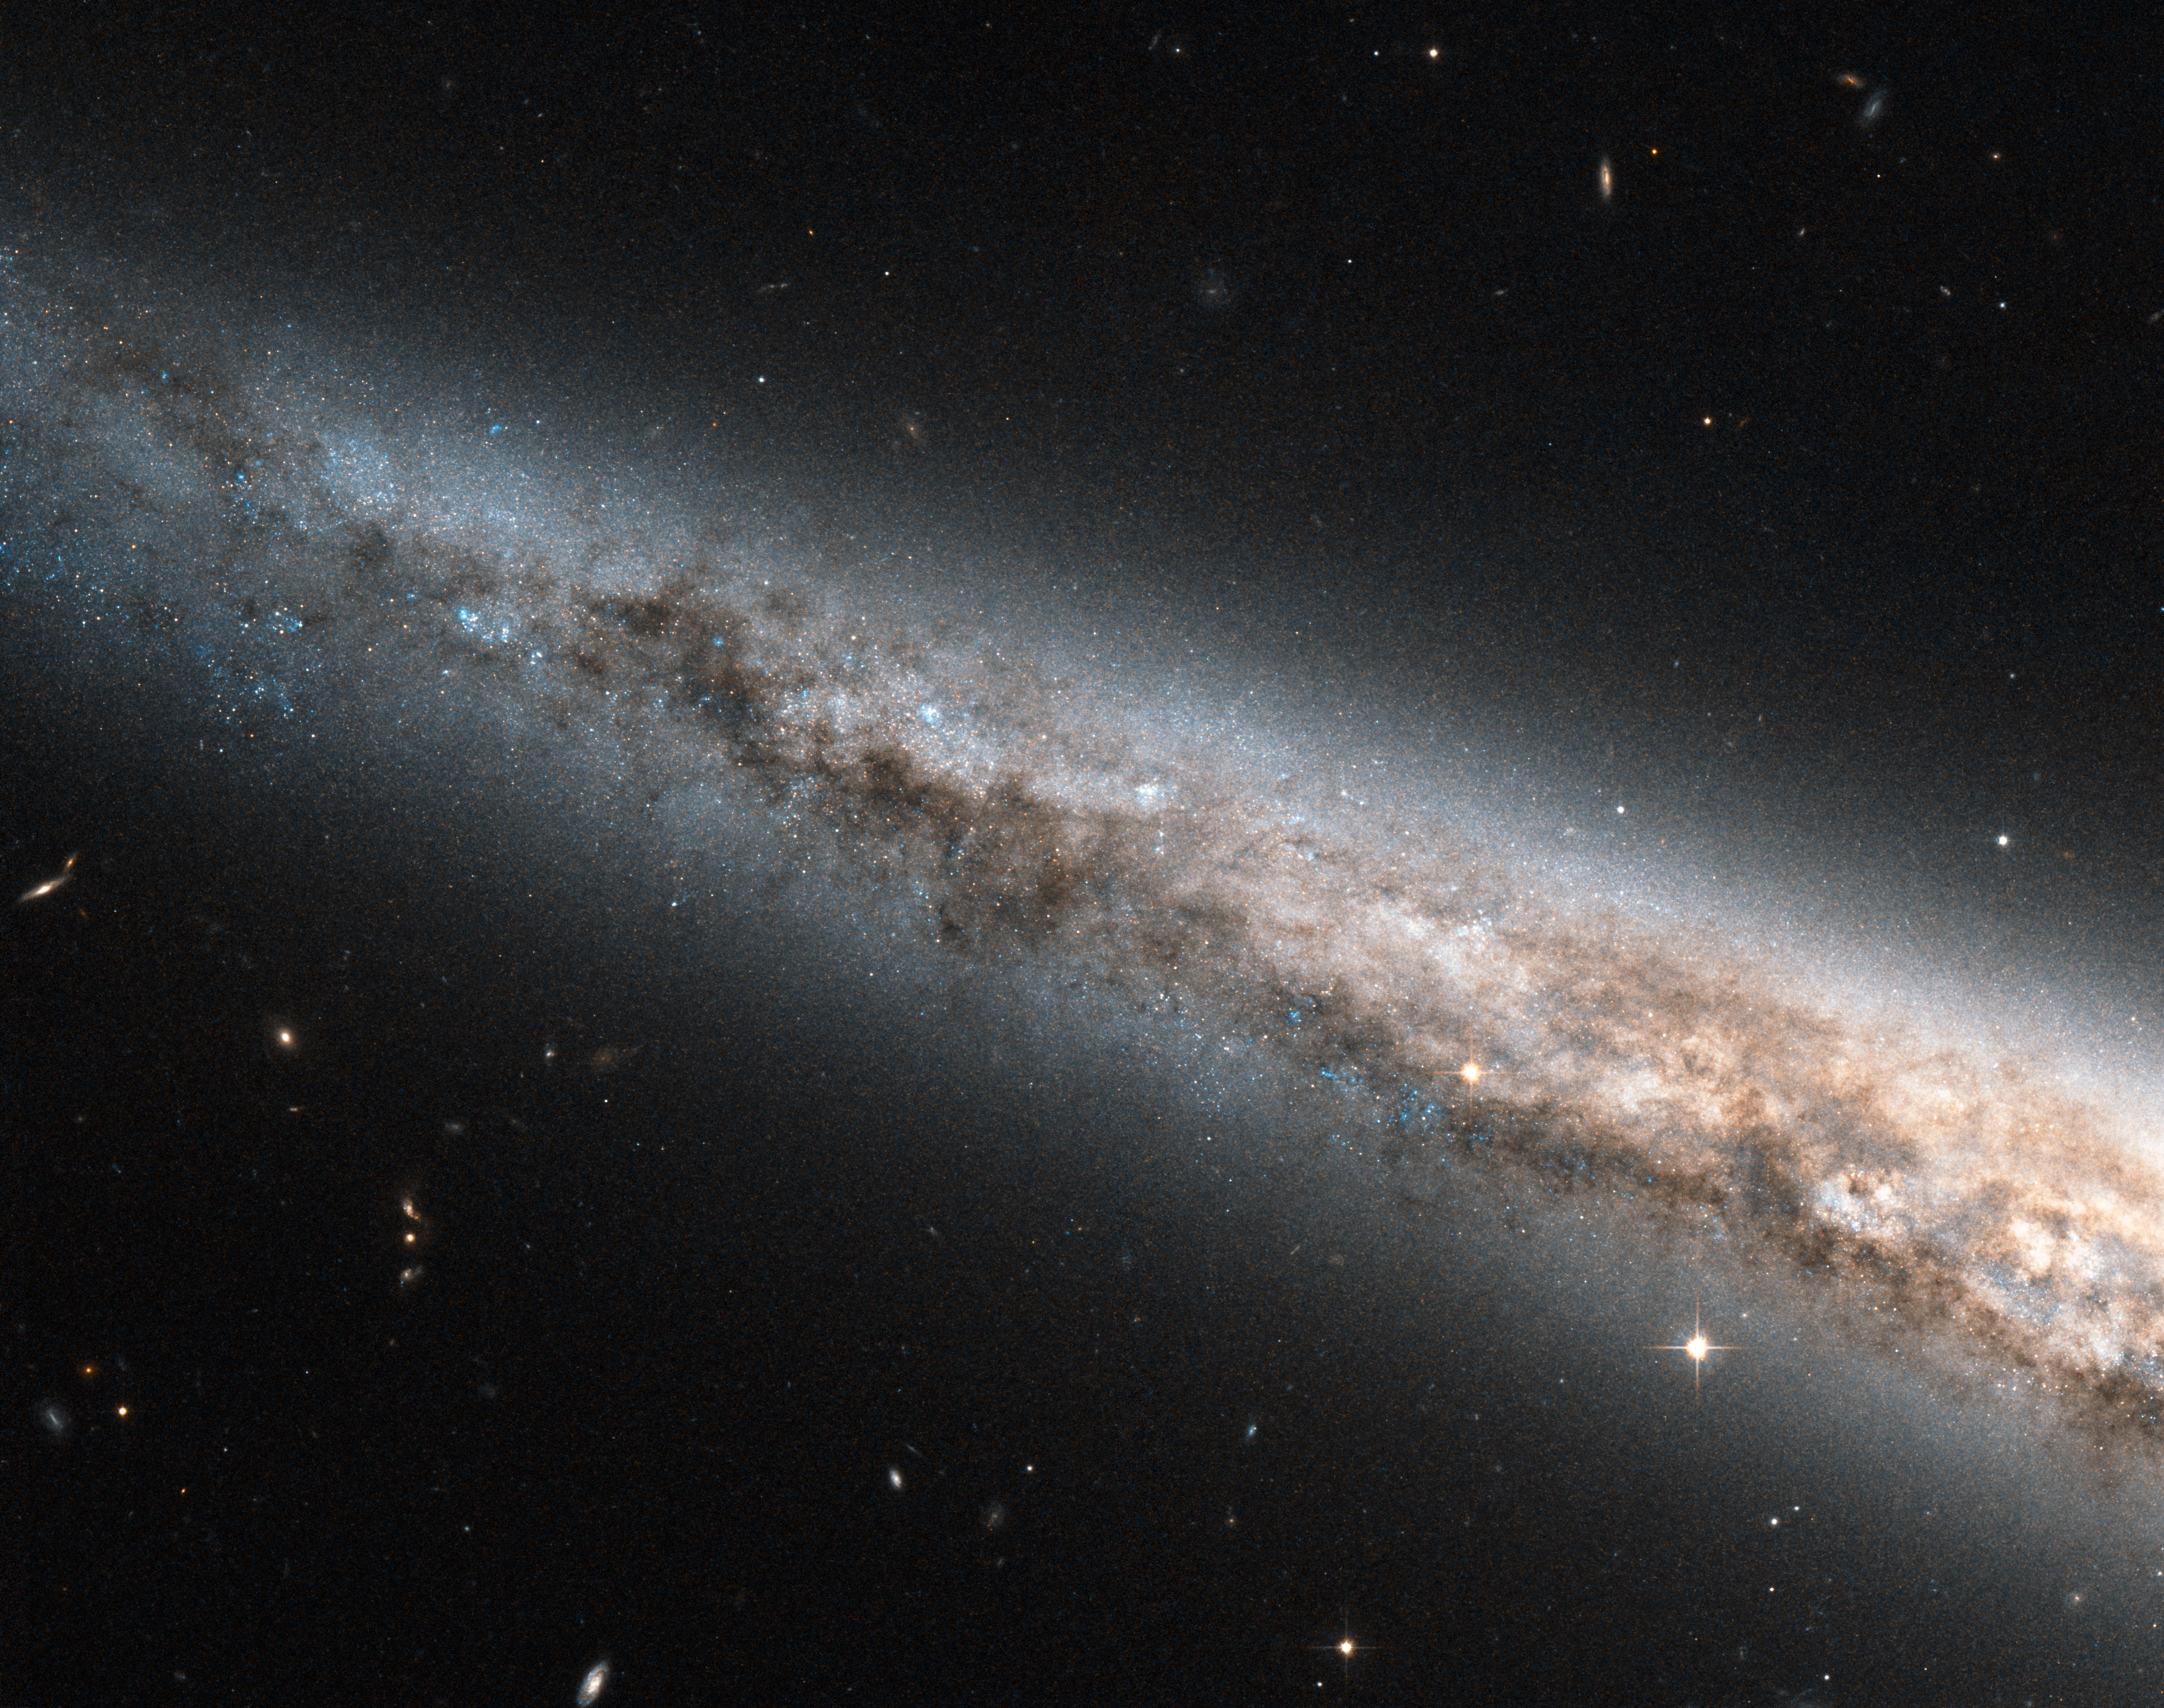

A galactic disc, edge-on and up close

This image snapped by the NASA/ESA Hubble Space Telescope reveals an exquisitely detailed view of part of the disc of the spiral galaxy NGC 4565. This bright galaxy is one of the most famous examples of an edge-on spiral galaxy, oriented perpendicularly to our line of sight so that we see right into its luminous disc. NGC 4565 has been nicknamed the Needle Galaxy because, when seen in full, it appears as a very narrow streak of light on the sky.

The edgewise view into the Needle Galaxy shown here looks very similar to the view we have from our Solar System into the core of the Milky Way. In both cases ribbons of dust block some of the light coming from the galactic disc. To the lower right, the dust stands in even starker contrast against the copious yellow light from the star-filled central regions. NGC 4565’s core is off camera to the lower right. For a full view of NGC 4565 for comparison’s sake, see this wider field of view from ESO’s Very Large Telescope.

Studying galaxies like NGC 4565 helps astronomers learn more about our home, the Milky Way. At a distance of only about 40 million light-years, NGC 4565 is relatively close by, and being seen edge-on makes it a particularly useful object for comparative study. As spiral galaxies go, NGC 4565 is a whopper — about a third as big again as the Milky Way.

The image was taken with Hubble’s Advanced Camera for Surveys and has a field of view of approximately 3.4 by 3.4 arcminutes.

A version of this image was entered into the Hubble’s Hidden Treasures Image Processing Competition by contestant Josh Barrington. Hidden Treasures is an initiative to invite astronomy enthusiasts to search the Hubble archive for stunning images that have never been seen by the general public. The competition has now closed and the results will be published soon.

Credit: ESA/Hubble & NASA